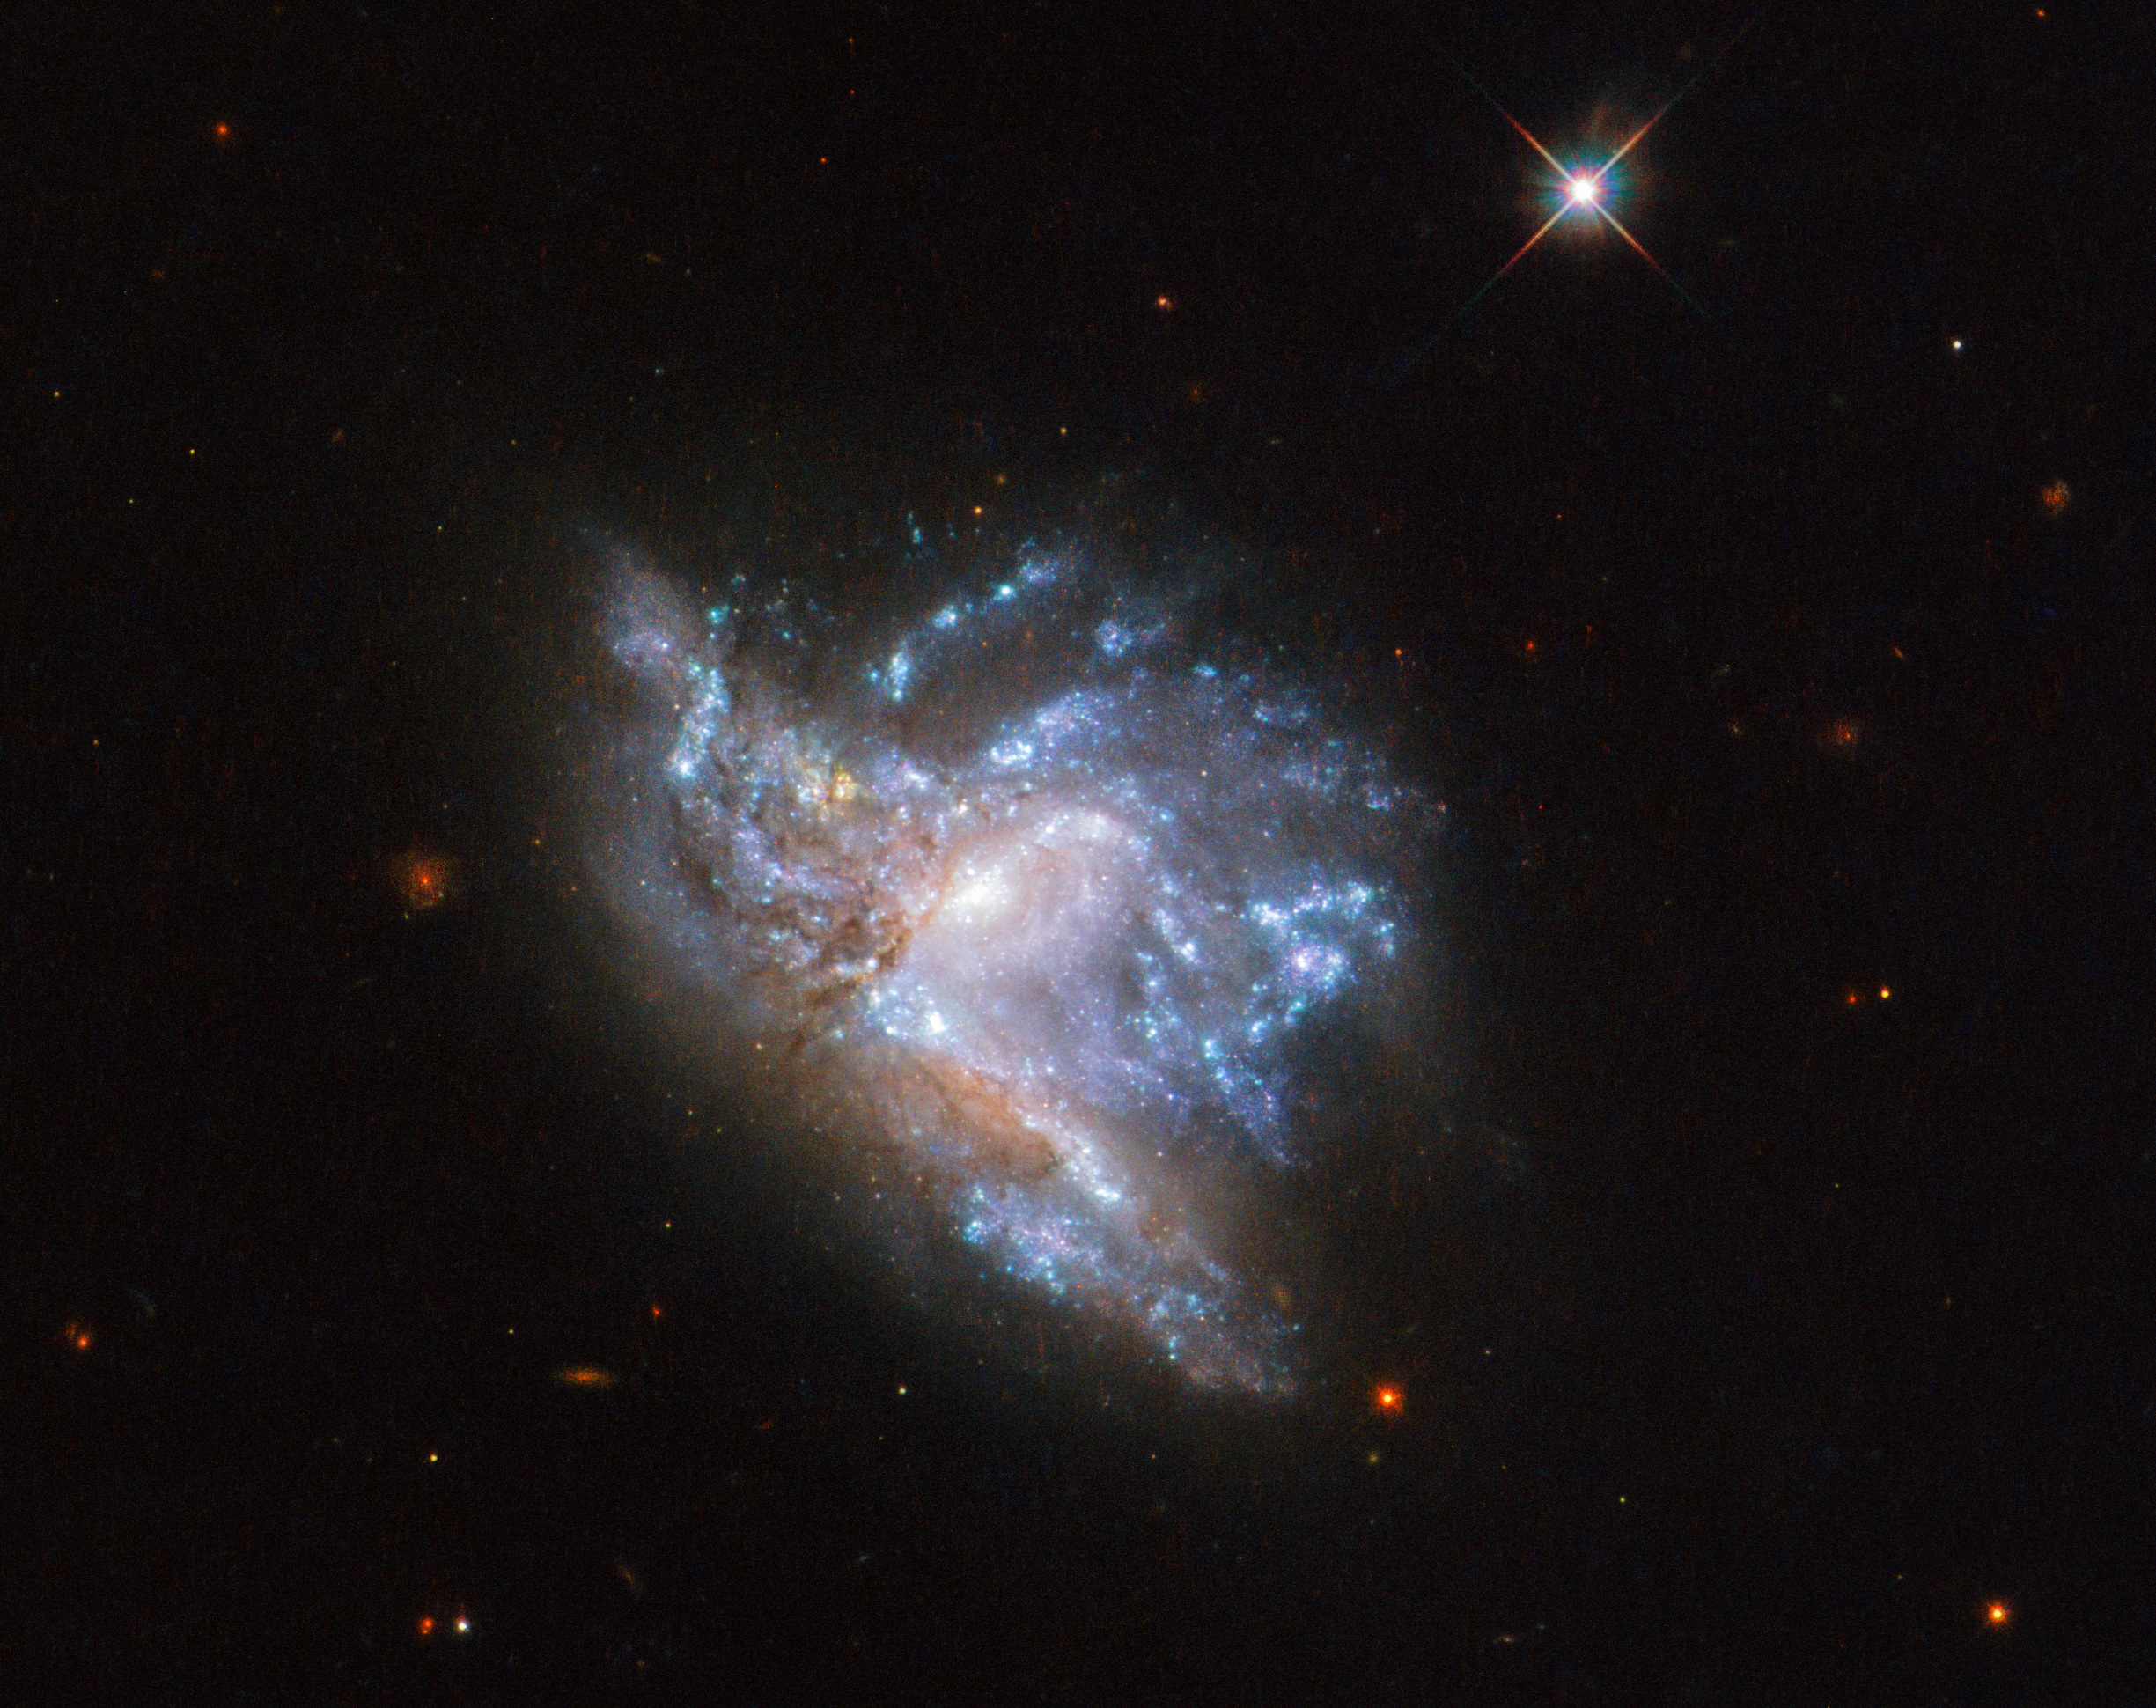

Colliding galaxies

Located in the constellation of Hercules, about 230 million light-years away, NGC 6052 is a pair of colliding galaxies. They were first discovered in 1784 by William Herschel and were originally classified as a single irregular galaxy because of their odd shape. However, we now know that NGC 6052 actually consists of two galaxies that are in the process of colliding. This particular image of NGC 6052 was taken using the Wide Field Camera 3 on the NASA/ESA Hubble Space Telescope.

A long time ago gravity drew the two galaxies together into the chaotic state we now observe. Stars from within both of the original galaxies now follow new trajectories caused by the new gravitational effects. However, actual collisions between stars themselves are very rare as stars are very small relative to the distances between them (most of a galaxy is empty space). Eventually things will settle down and one day the two galaxies will have fully merged to form a single, stable galaxy.

Our own galaxy, the Milky Way, will undergo a similar collision in the future with our nearest galactic neighbour, the Andromeda Galaxy. Although this is not expected to happen for around 4 billion years so there is nothing to worry about just yet.

This object was previously observed by Hubble with its old WFPC2 camera. That image was released in 2015.

Credit: ESA/Hubble & NASA, A. Adamo et al.